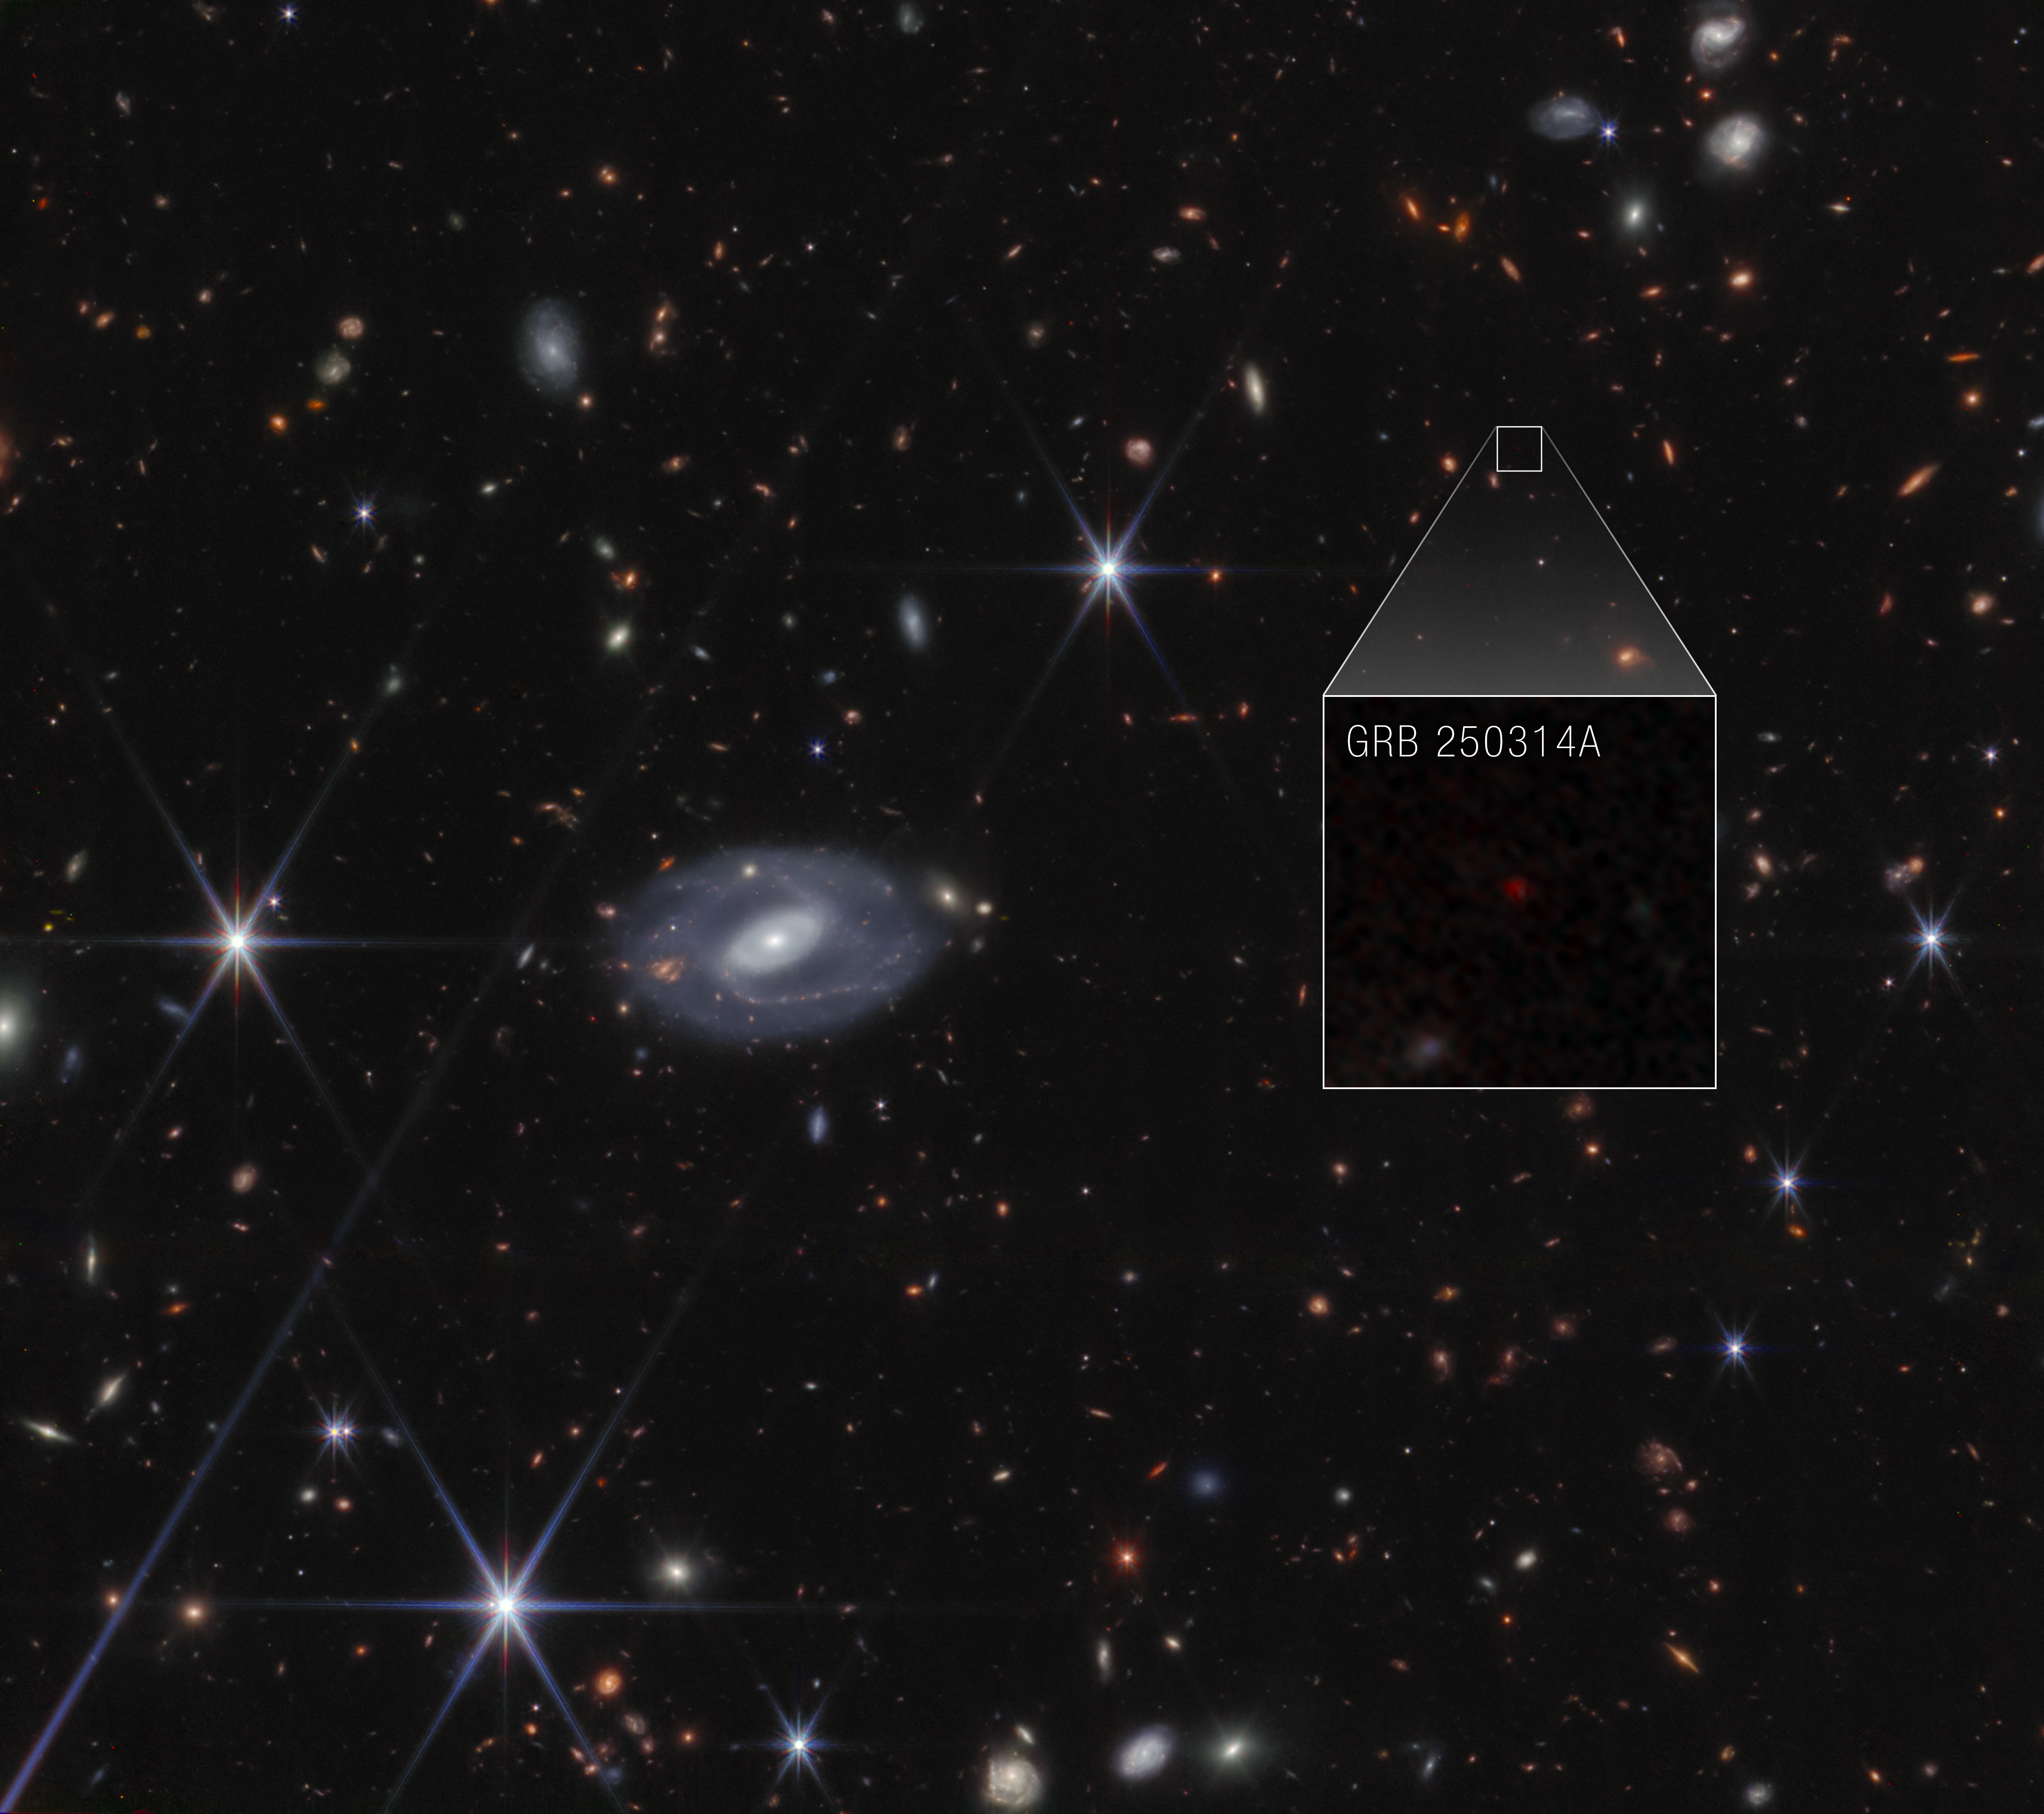

GRB 250314A Pull-out (NIRCam image)

The NASA/ESA/CSA James Webb Space Telescope identified the source of a super bright flash of light known as a gamma-ray burst: a supernova that exploded when the universe was only 730 million years old. Webb’s high-resolution near-infrared images also detected the supernova’s host galaxy. Its quick-turn observations verified data taken by other telescopes that followed bright emission from a gamma-ray burst that came onto the scene in mid-March.

Credit: NASA, ESA, CSA, STScI, A. Levan (IMAPP), Image Processing: A. Pagan (STScI)